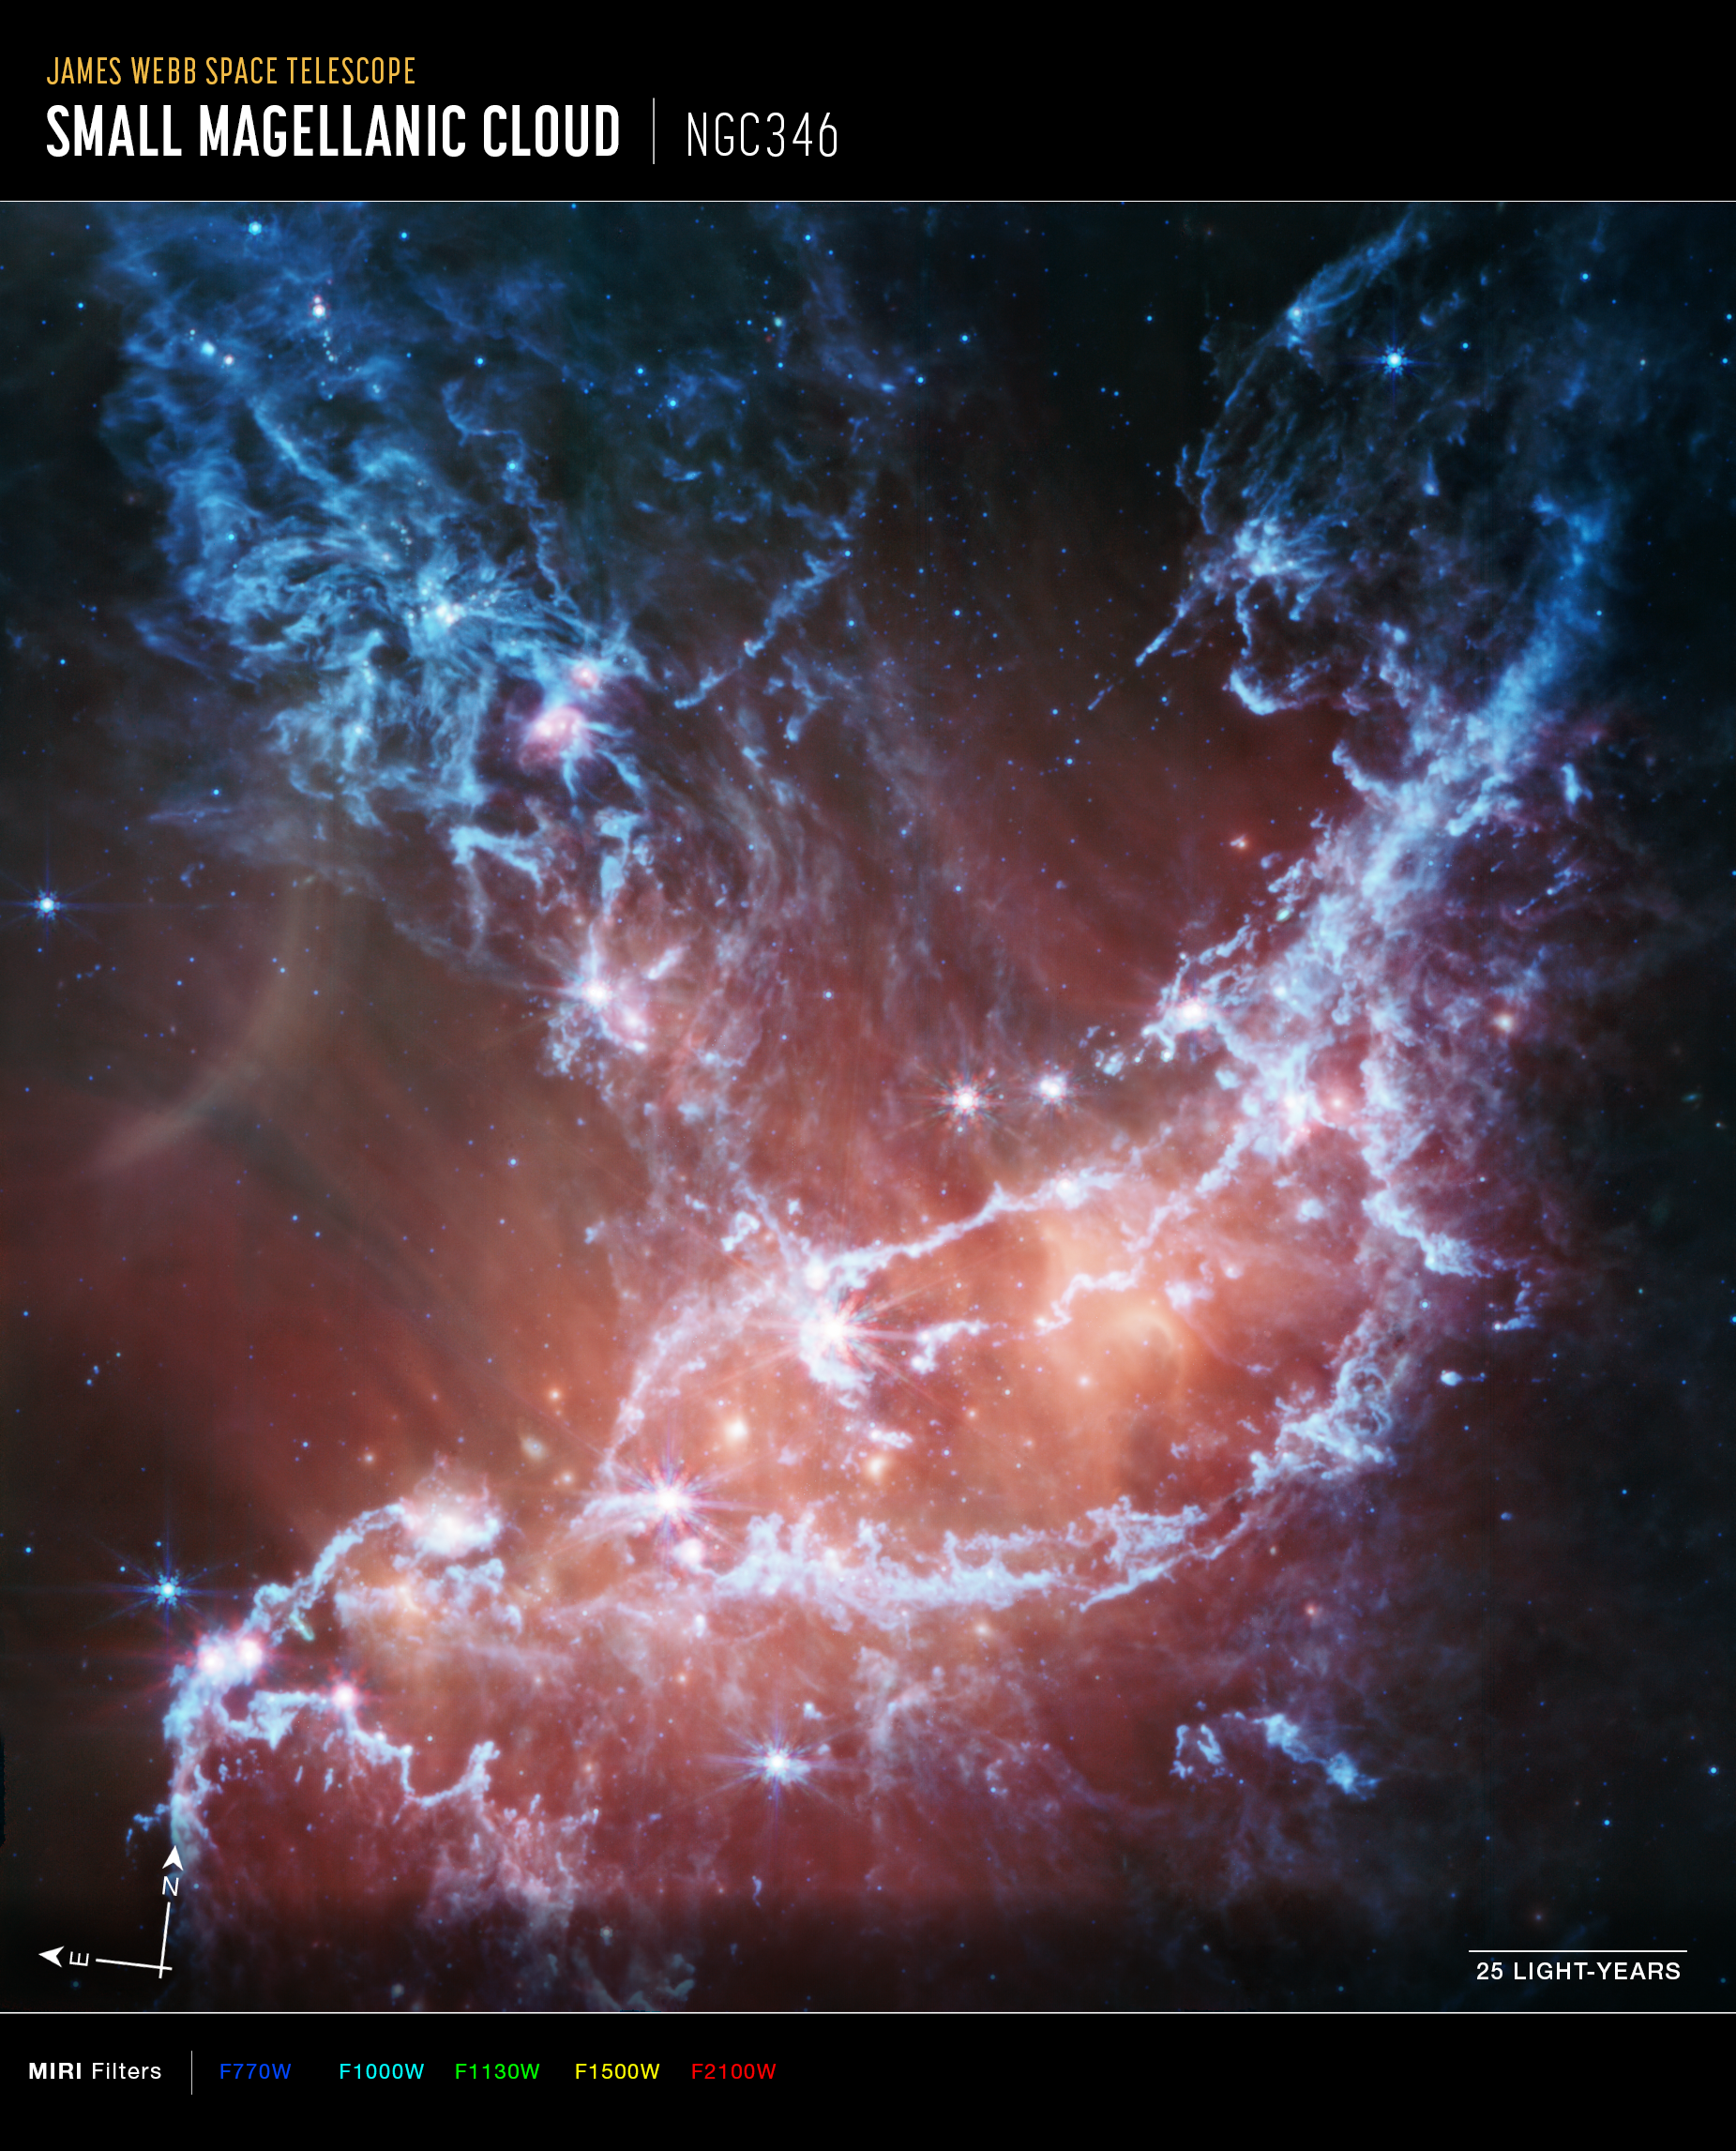

NGC 346 (MIRI image, annotated)

This new infrared image of NGC 346 from the NASA/ESA/CSA James Webb Space Telescope’s Mid-Infrared Instrument (MIRI) traces emission from cool gas and dust. In this image blue represents silicates and sooty chemical molecules known as polycyclic aromatic hydrocarbons, or PAHs. More diffuse red emission shines from warm dust heated by the brightest and most massive stars in the heart of the region. Bright patches and filaments mark areas with abundant numbers of protostars.

This image includes 7.7-micron light shown in blue, 10 microns in cyan, 11.3 microns in green, 15 microns in yellow, and 21 microns in red (770W, 1000W, 1130W, 1500W, and 2100W filters, respectively).

Credit: NASA, ESA, CSA, N. Habel (JPL), P. Kavanagh (Maynooth University)